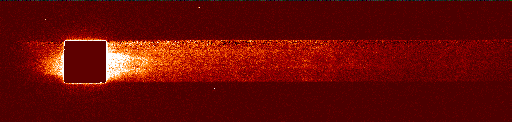

Supernova 1987a

The STIS spectrograph viewed the entire inner ring in far-ultraviolet light, spreading it into a spectrum. The Earth's atmosphere completely blocks ultraviolet radiation from reaching the Earth's surface, hence astronomers can study the ultraviolet universe only from orbiting telescopes. The dark square in this image is where the spectrum was processed to remove the emission from hydrogen in the Earth's outer atmosphere.

Credit: George Sonneborn (Goddard Space Flight Center), Jason Pun (NOAO), the STIS Instrument Definition Team, and NASA/ESA